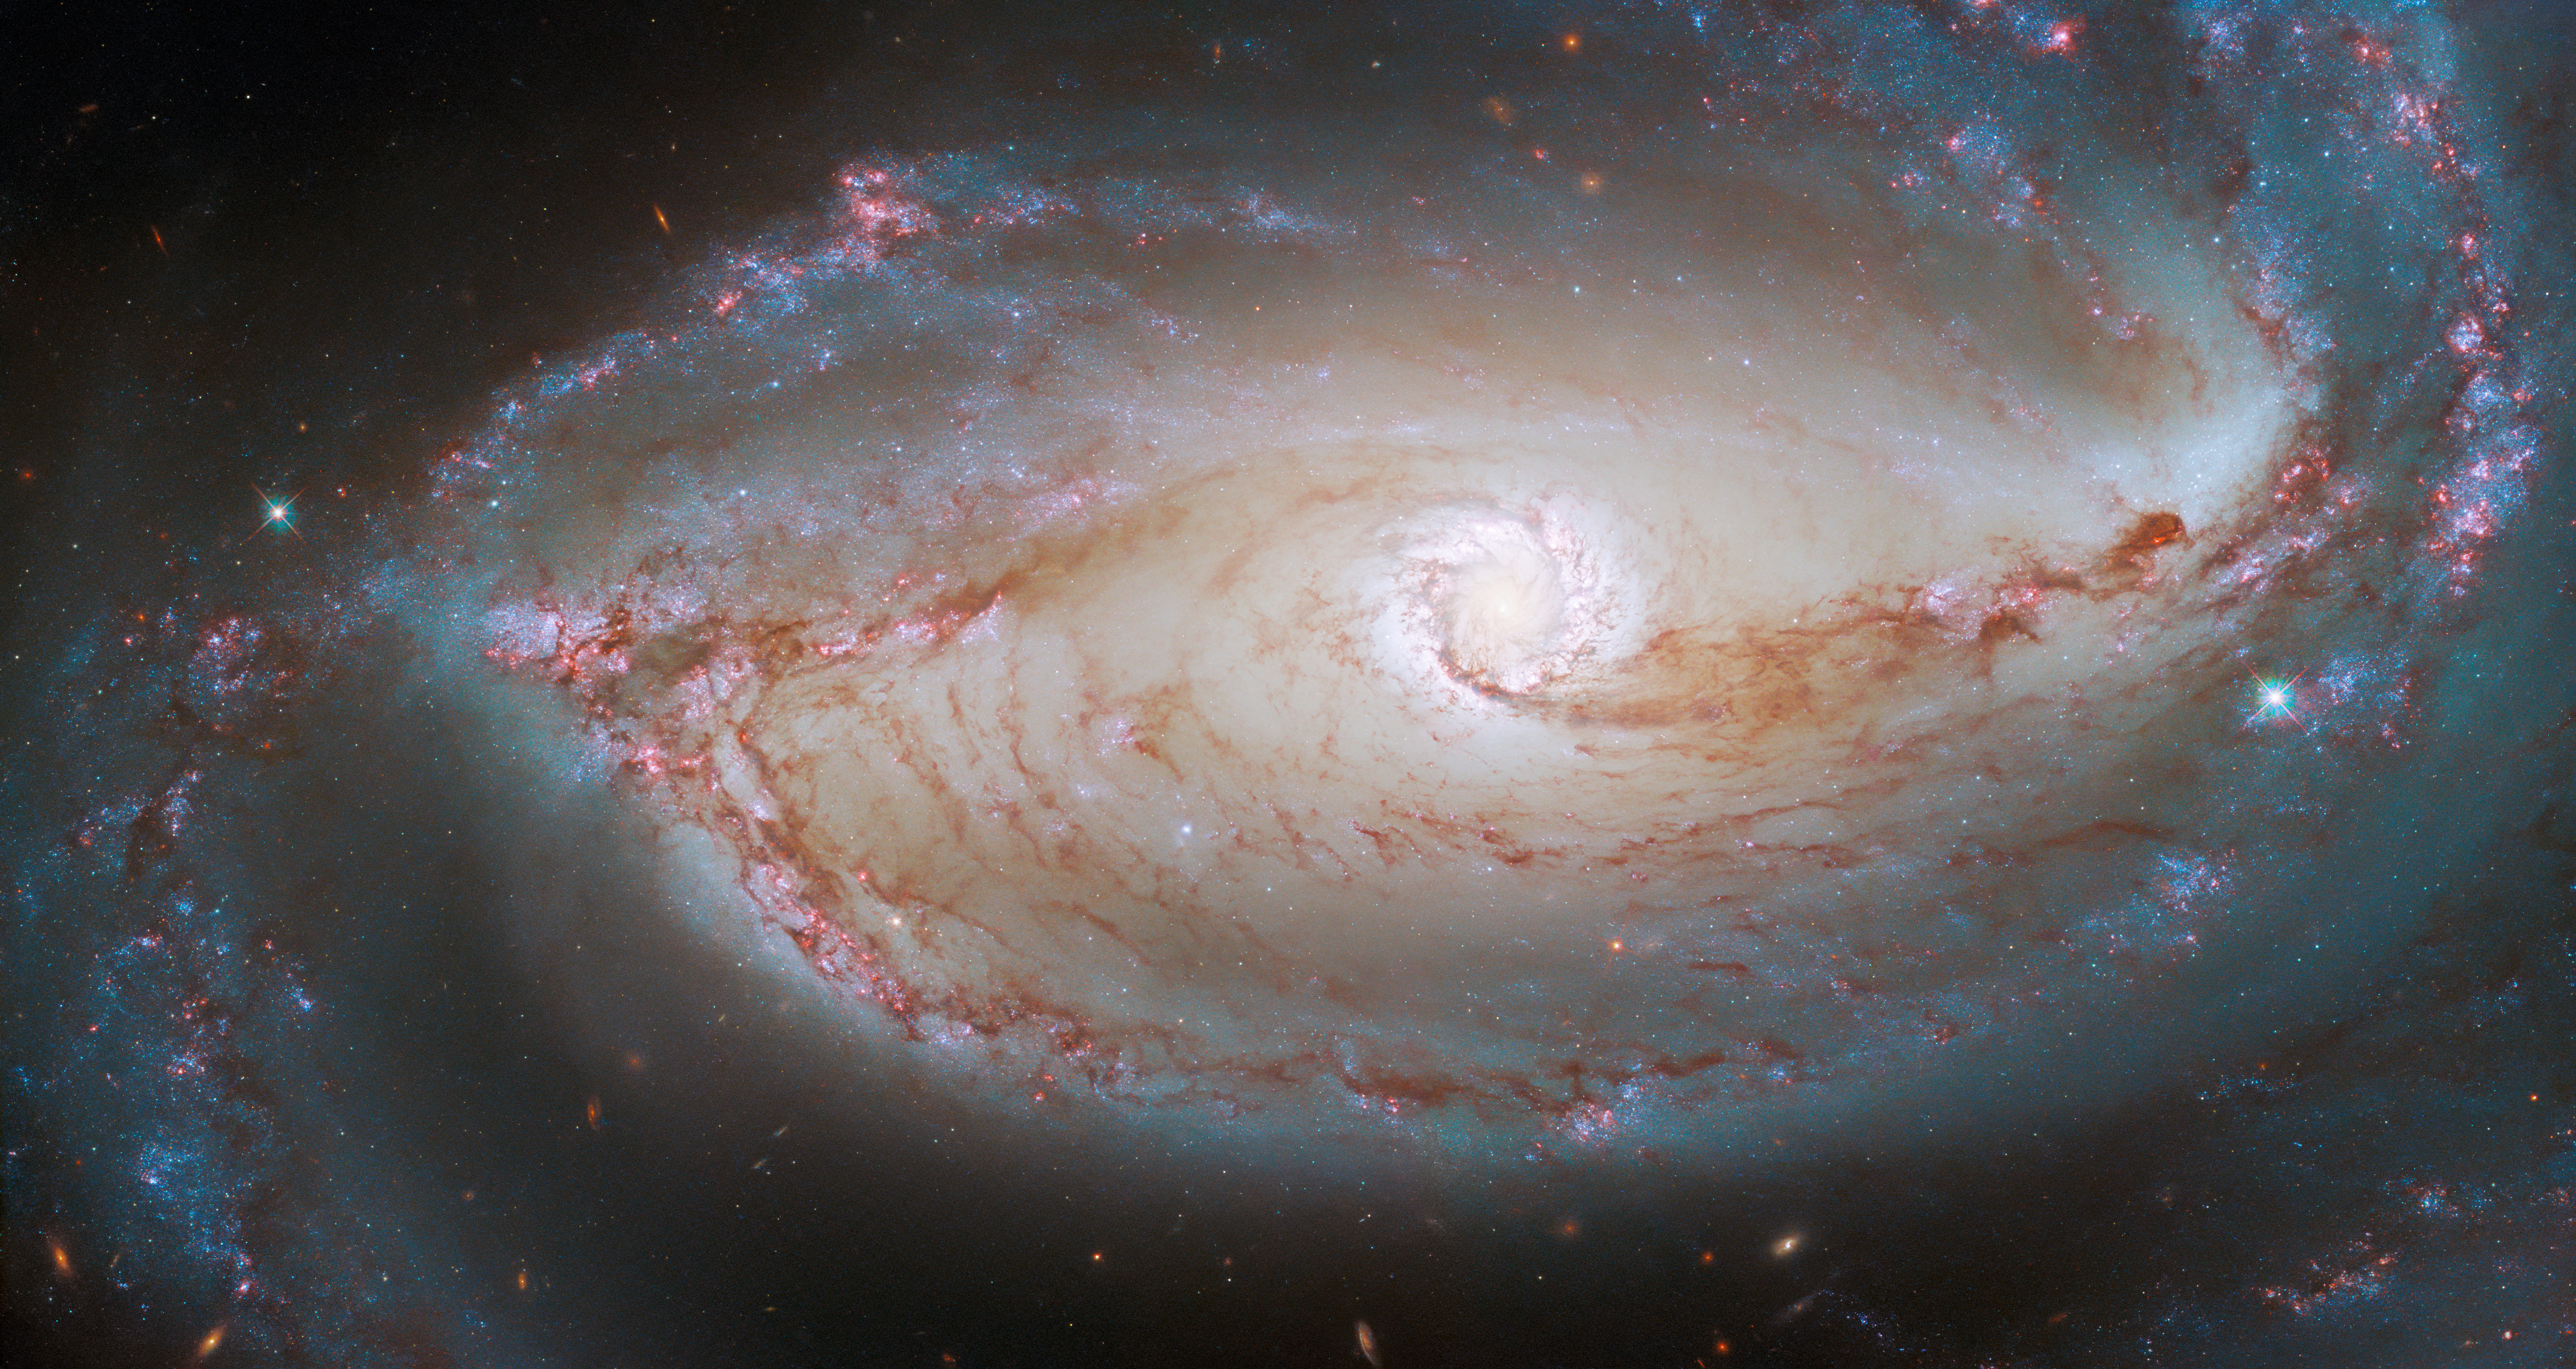

Eye of the Galaxy

This finely detailed image shows the heart of NGC 1097, a barred spiral galaxy that lies about 48 million light-years from Earth in the constellation Fornax. This picture reveals the intricacy of the web of stars and dust at NGC 1097’s centre, with the long tendrils of dust picked out in a dark red hue. The extent to which the galaxy’s structure is revealed is thanks to two instruments on the NASA/ESA Hubble Space Telescope: the Wide Field Camera 3 (WFC3) and the Advanced Camera for Surveys (ACS).

The idea that a single image can be taken using two different cameras is not very intuitive. However, it makes far more sense after delving into how beautiful astronomical images like this one are composed. A helpful starting point is to consider what colour is, exactly. Our eyes can detect light waves at optical wavelengths between roughly 380 and 750 nanometres, using three types of receptors, each of which is sensitive to just a slice of that range. Our brain interprets these specific wavelengths as colours. By contrast, a telescope camera like the WFC3 or ACS is sensitive to a single, broad range of wavelengths to maximise the amount of light collected. Raw images from telescopes are always in greyscale, only showing the amount of the light captured across all those wavelengths.

Colour images from telescopes are indirectly possible, however, with the help of filters. By sliding a filter over the aperture of an instrument like the WFC3 or ACS, only light from a very specific wavelength range is let through — one such filter used in this image is for green light around 555 nanometres. This yields a greyscale image showing only the amount of light with that wavelength. This multicolour image of NGC 1097 is composed of images using seven different filters in total.

Credit: ESA/Hubble & NASA, D. Sand, K. Sheth